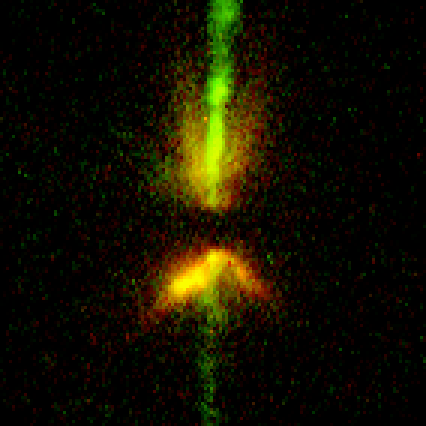

Disk Around Young Star. A View of DG Tauri B

DG Tauri B appears very similar to HH 30, with jets and a central dark lane with reflected starlight at its edges. In this WFPC2 image, the dust lane is much thicker than seen in HH 30, indicating that dusty material is still in the process of falling onto the hidden star and disk. The bright jet extends a distance of 90 billion miles (about 145 billion kilometres) away from the system.

Credit: Chris Burrows (STScI), the WFPC2 Science Team and NASA/ESA